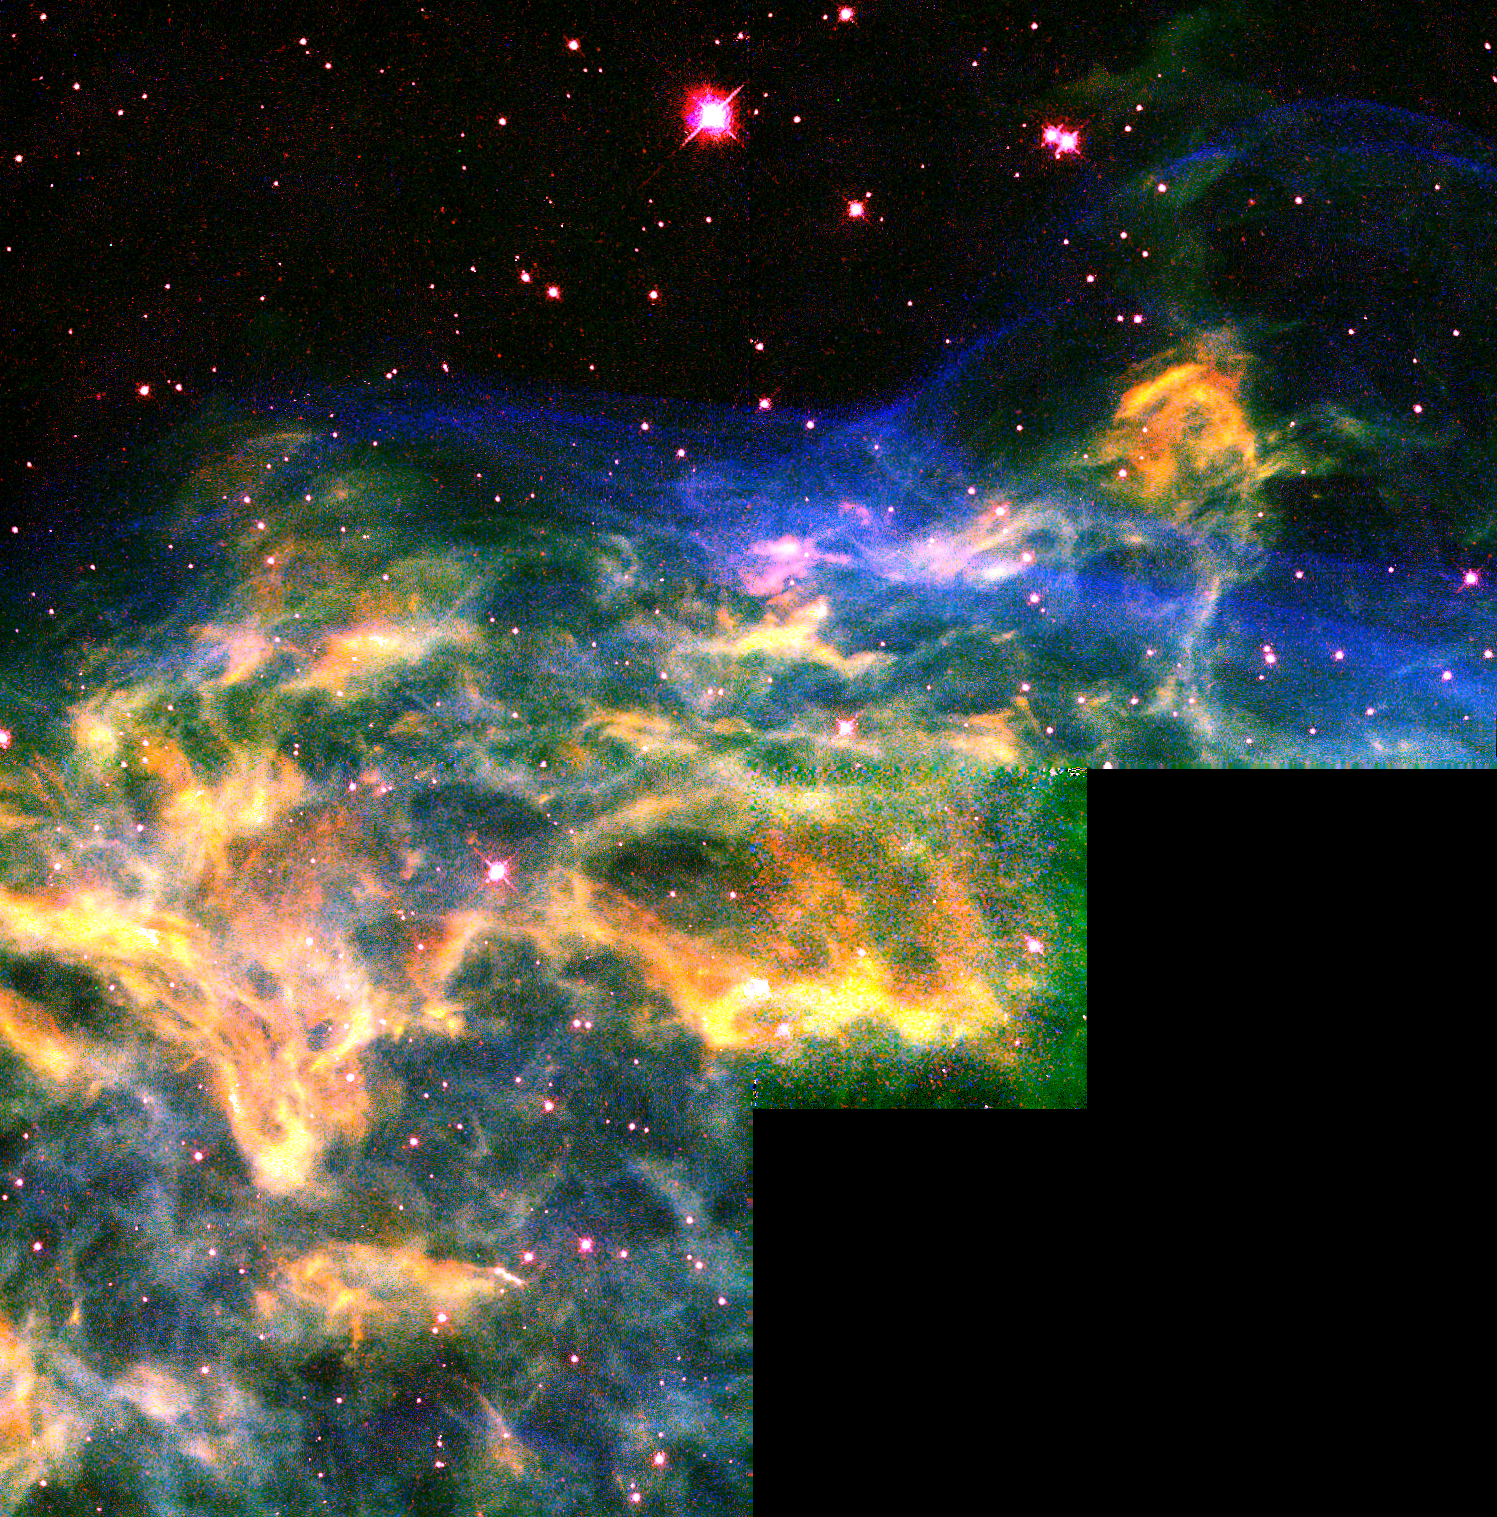

Hubble Watches Star Tear Apart its Neighborhood

NASA/ESA Hubble Space Telescope has snapped a view of a stellar demolition zone in our Milky Way Galaxy: a massive star, nearing the end of its life, tearing apart the shell of surrounding material it blew off 250, 000 years ago with its strong stellar wind. The shell of material, dubbed the Crescent Nebula (NGC 6888), surrounds the 'hefty', aging star WR 136, an extremely rare and short-lived class of super-hot star called a Wolf-Rayet. Hubble's multicolored picture reveals with unprecedented clarity that the shell of matter is a network of filaments and dense knots, all enshrouded in a thin 'skin' of gas [seen in blue]. The whole structure looks like oatmeal trapped inside a balloon. The skin is glowing because it is being blasted by ultraviolet light from WR 136.

Credit: NASA/ESA, Brian D. Moore, Jeff Hester, Paul Scowen (Arizona State University), Reginald Dufour (Rice University)